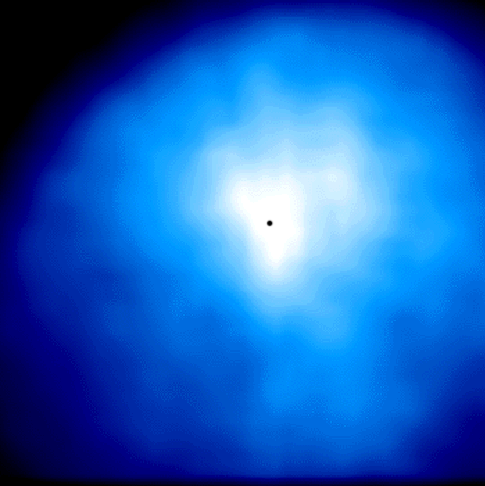

Comet Hyakutake - C/1996 B2

This image, shown in blue was taken with an ultraviolet 'Woods' filter image that shows the distribution of scattered ultraviolet radiation from hydrogen atoms in the inner coma.

Credit: M.R. Combi (The University of Michigan)